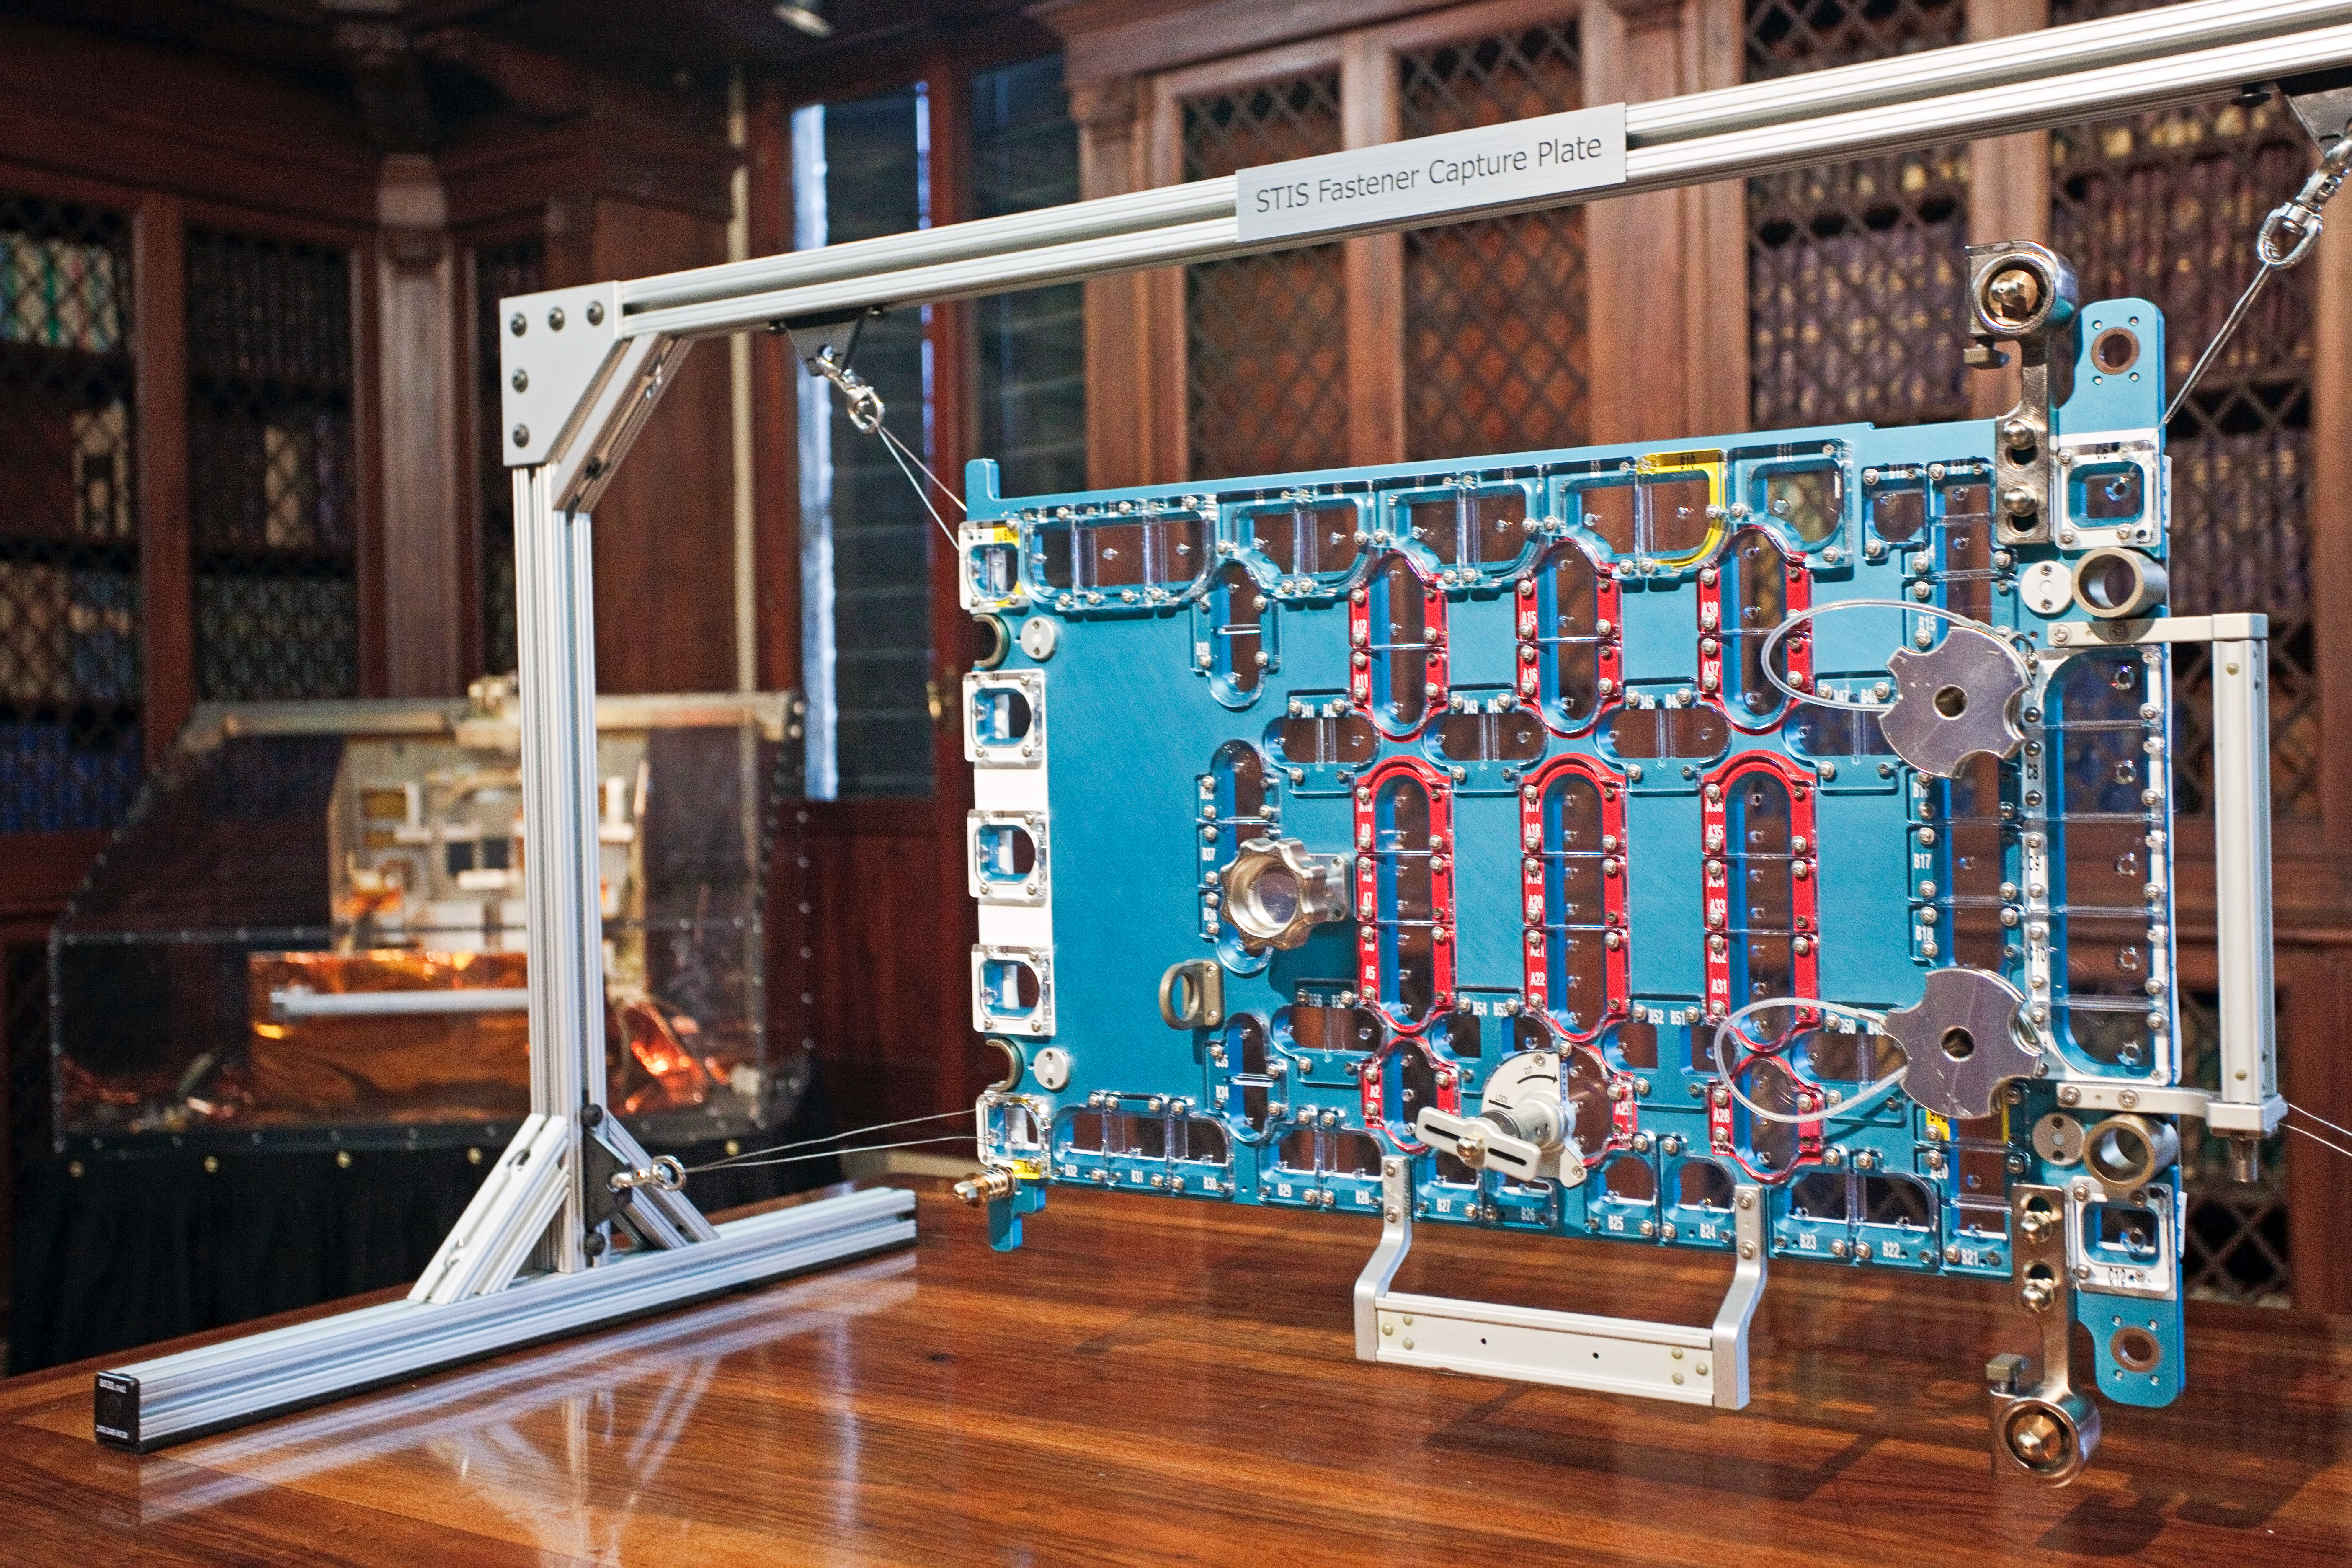

STIS fastener capture plate

This image shows the STIS fastener capture plate, a specialised tool used by astronauts during Hubble Servicing Mission 4 in 2009. The STIS fastener capture plate is attached over the cover of the Space Telescope Imaging Spectrograph (one of Hubble’s science instruments) and captures screws as they are removed from the instrument. This image was taken at the “Il telescopio spaziale Hubble alle frontiere dell’universo” exhibition in Venice, Italy in October 2010.

Credit: ESA/Hubble